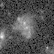

Galaxies: snapshots in time

Single images from the Galaxies: Snapshots in Time collage.

Credit: NASA & ESA